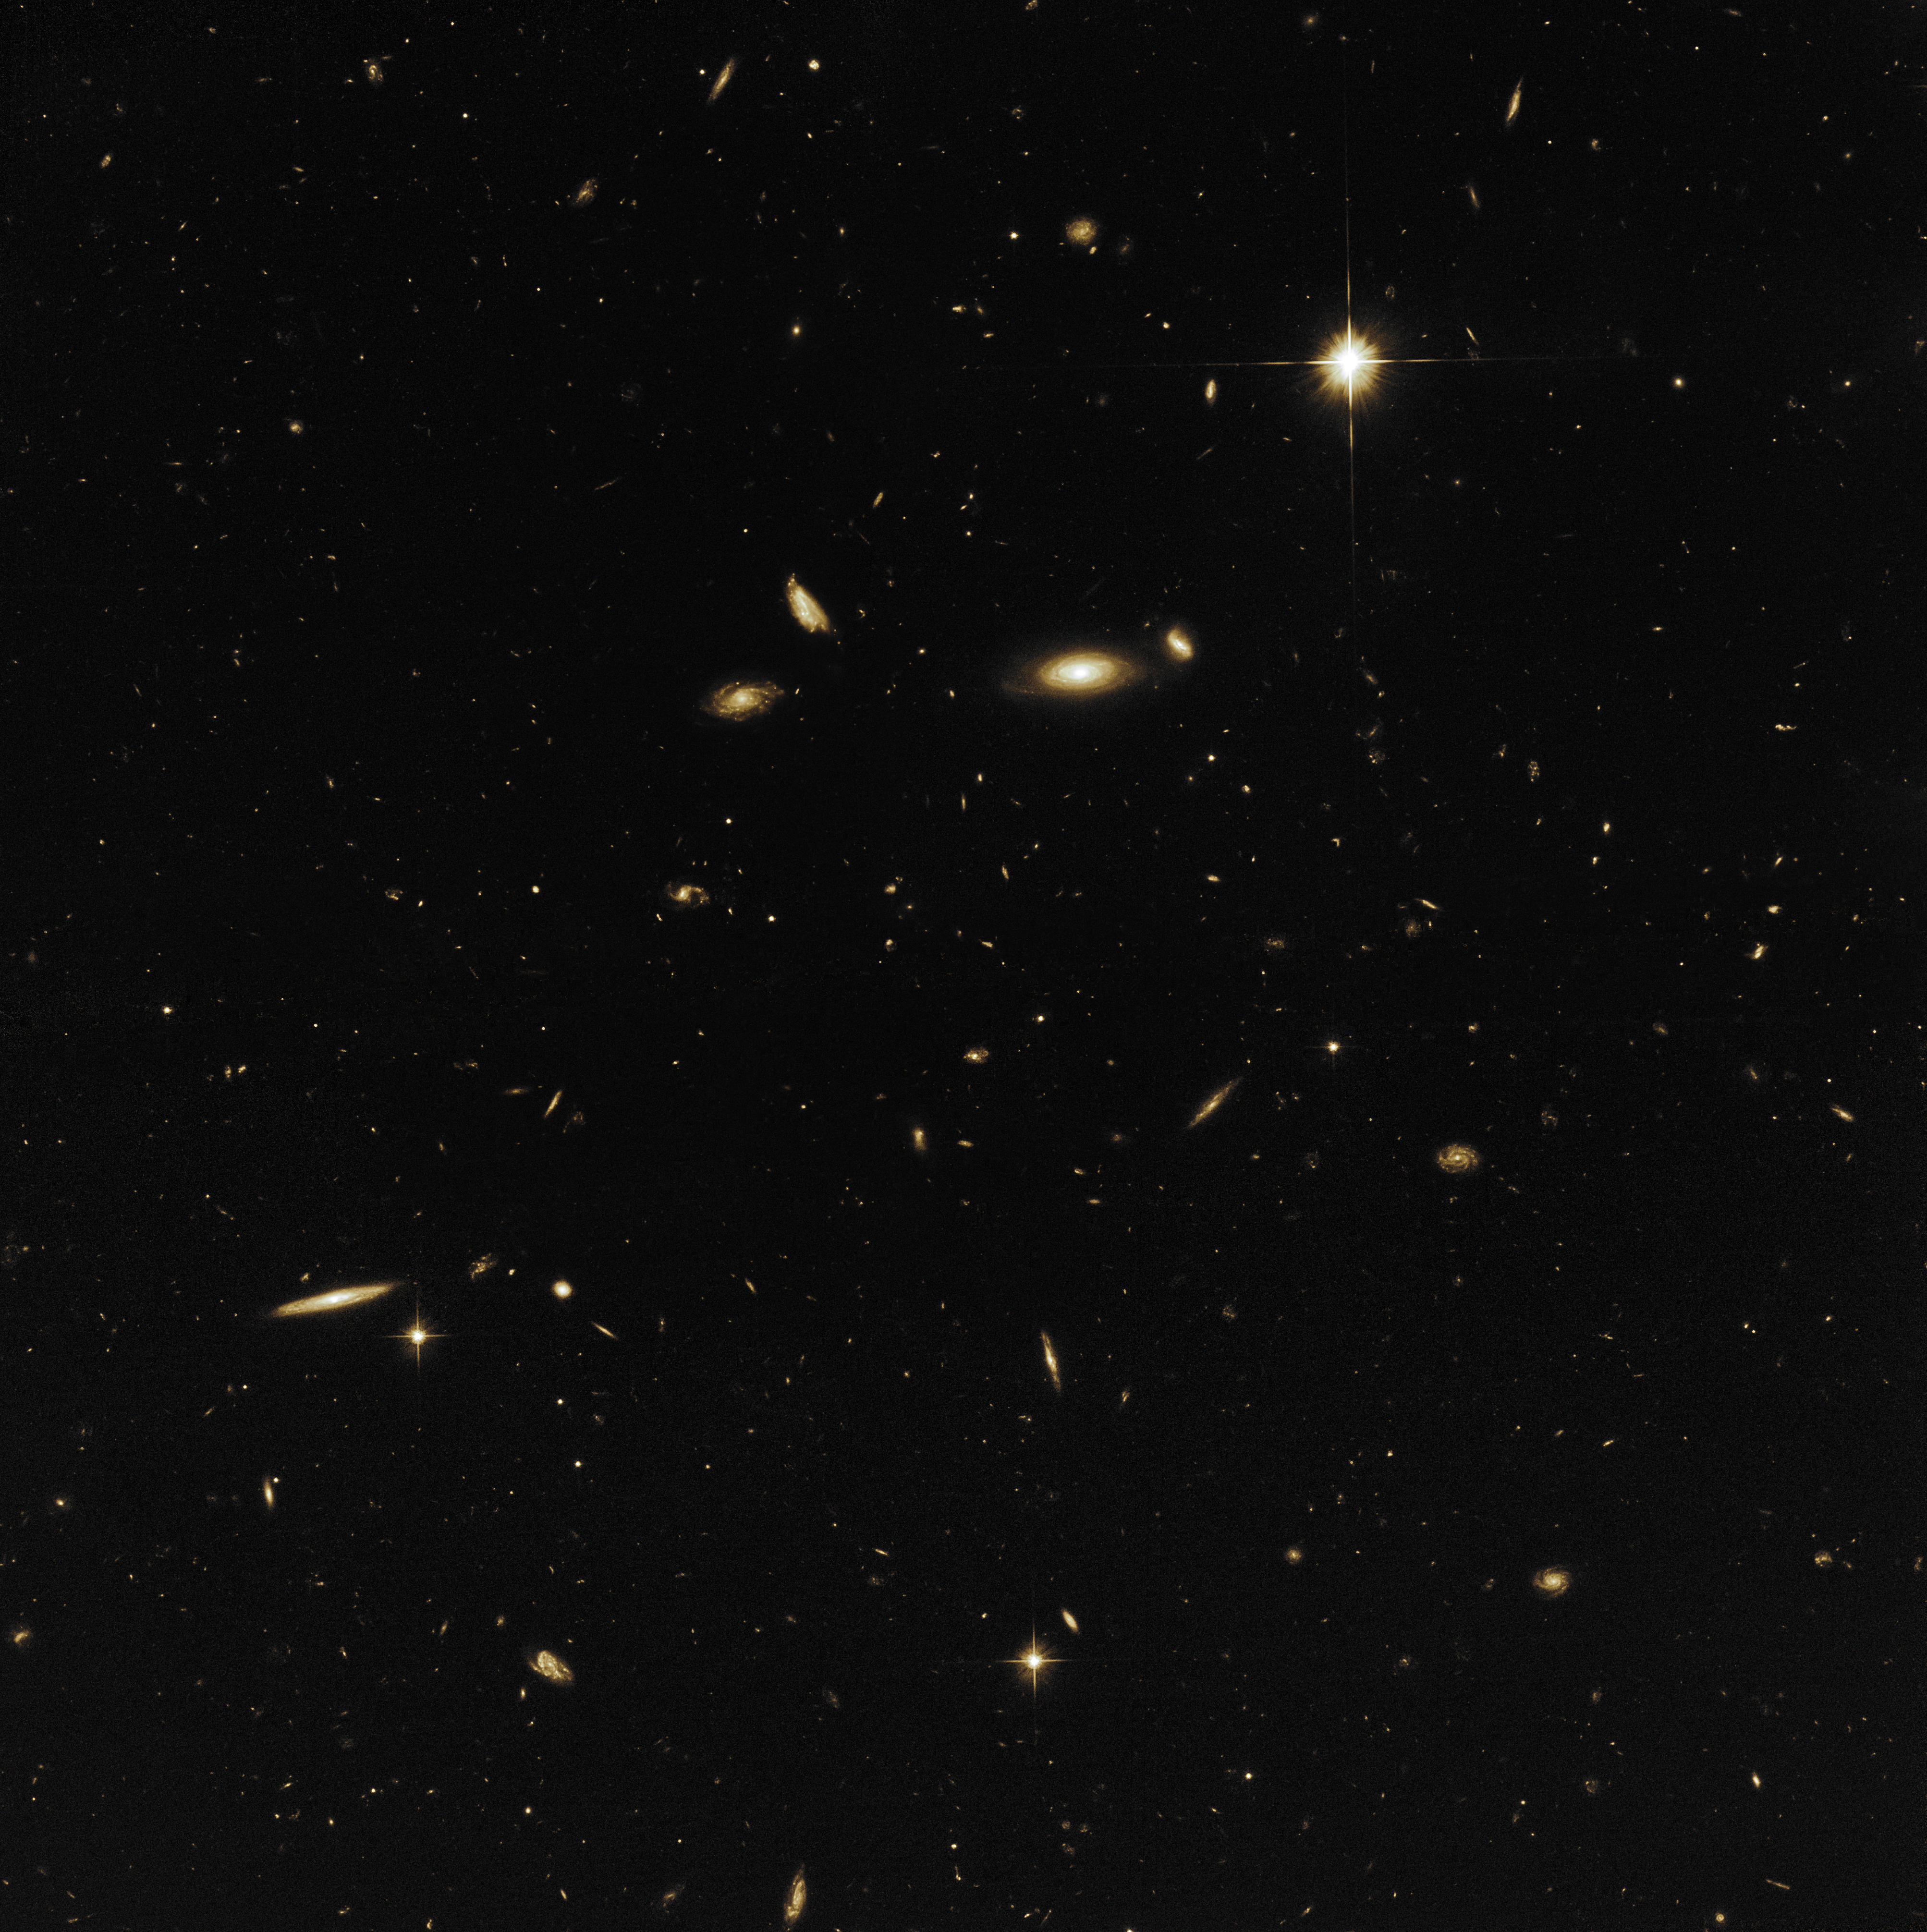

A sea of galaxies

While one instrument of Hubble observed the target for its 27th anniversary — the galaxies NGC 4302 and NGC 4298 — another instrument simultaneously observed a nearby patch of the sky. These so-called parallel field observations increase the efficiency of how the telescope is used when making observations.

This specific parallel field shows an area of the sky, awash largely with spiral galaxies like our Milky Way. Most of the prominent galaxies look different only because they are tilted at various orientations with respect to Earth — from edge-on to face-on. A few others are currently interacting or in the process of a merger. The objects with diffraction spikes are foreground stars in our own galaxy.

Credit: NASA, ESA, and M. Mutchler (STScI)